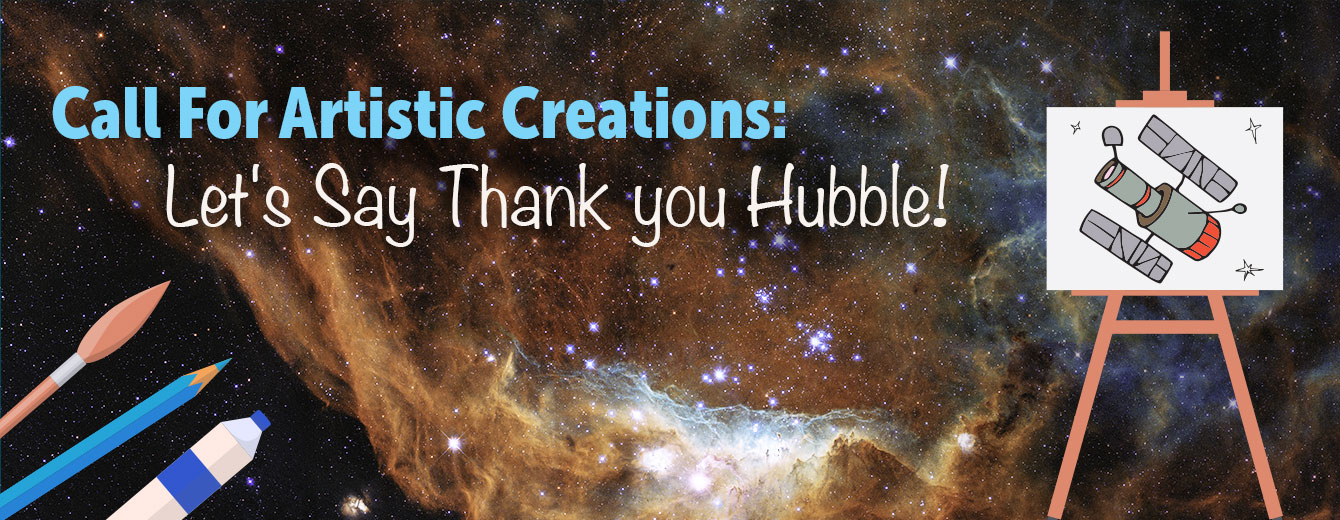

Call for Artistic Creations: Let’s Say Thank You to Hubble!

Call for Artistic Creations: Let’s Say Thank You to Hubble!

Credit: ESA/Hubble